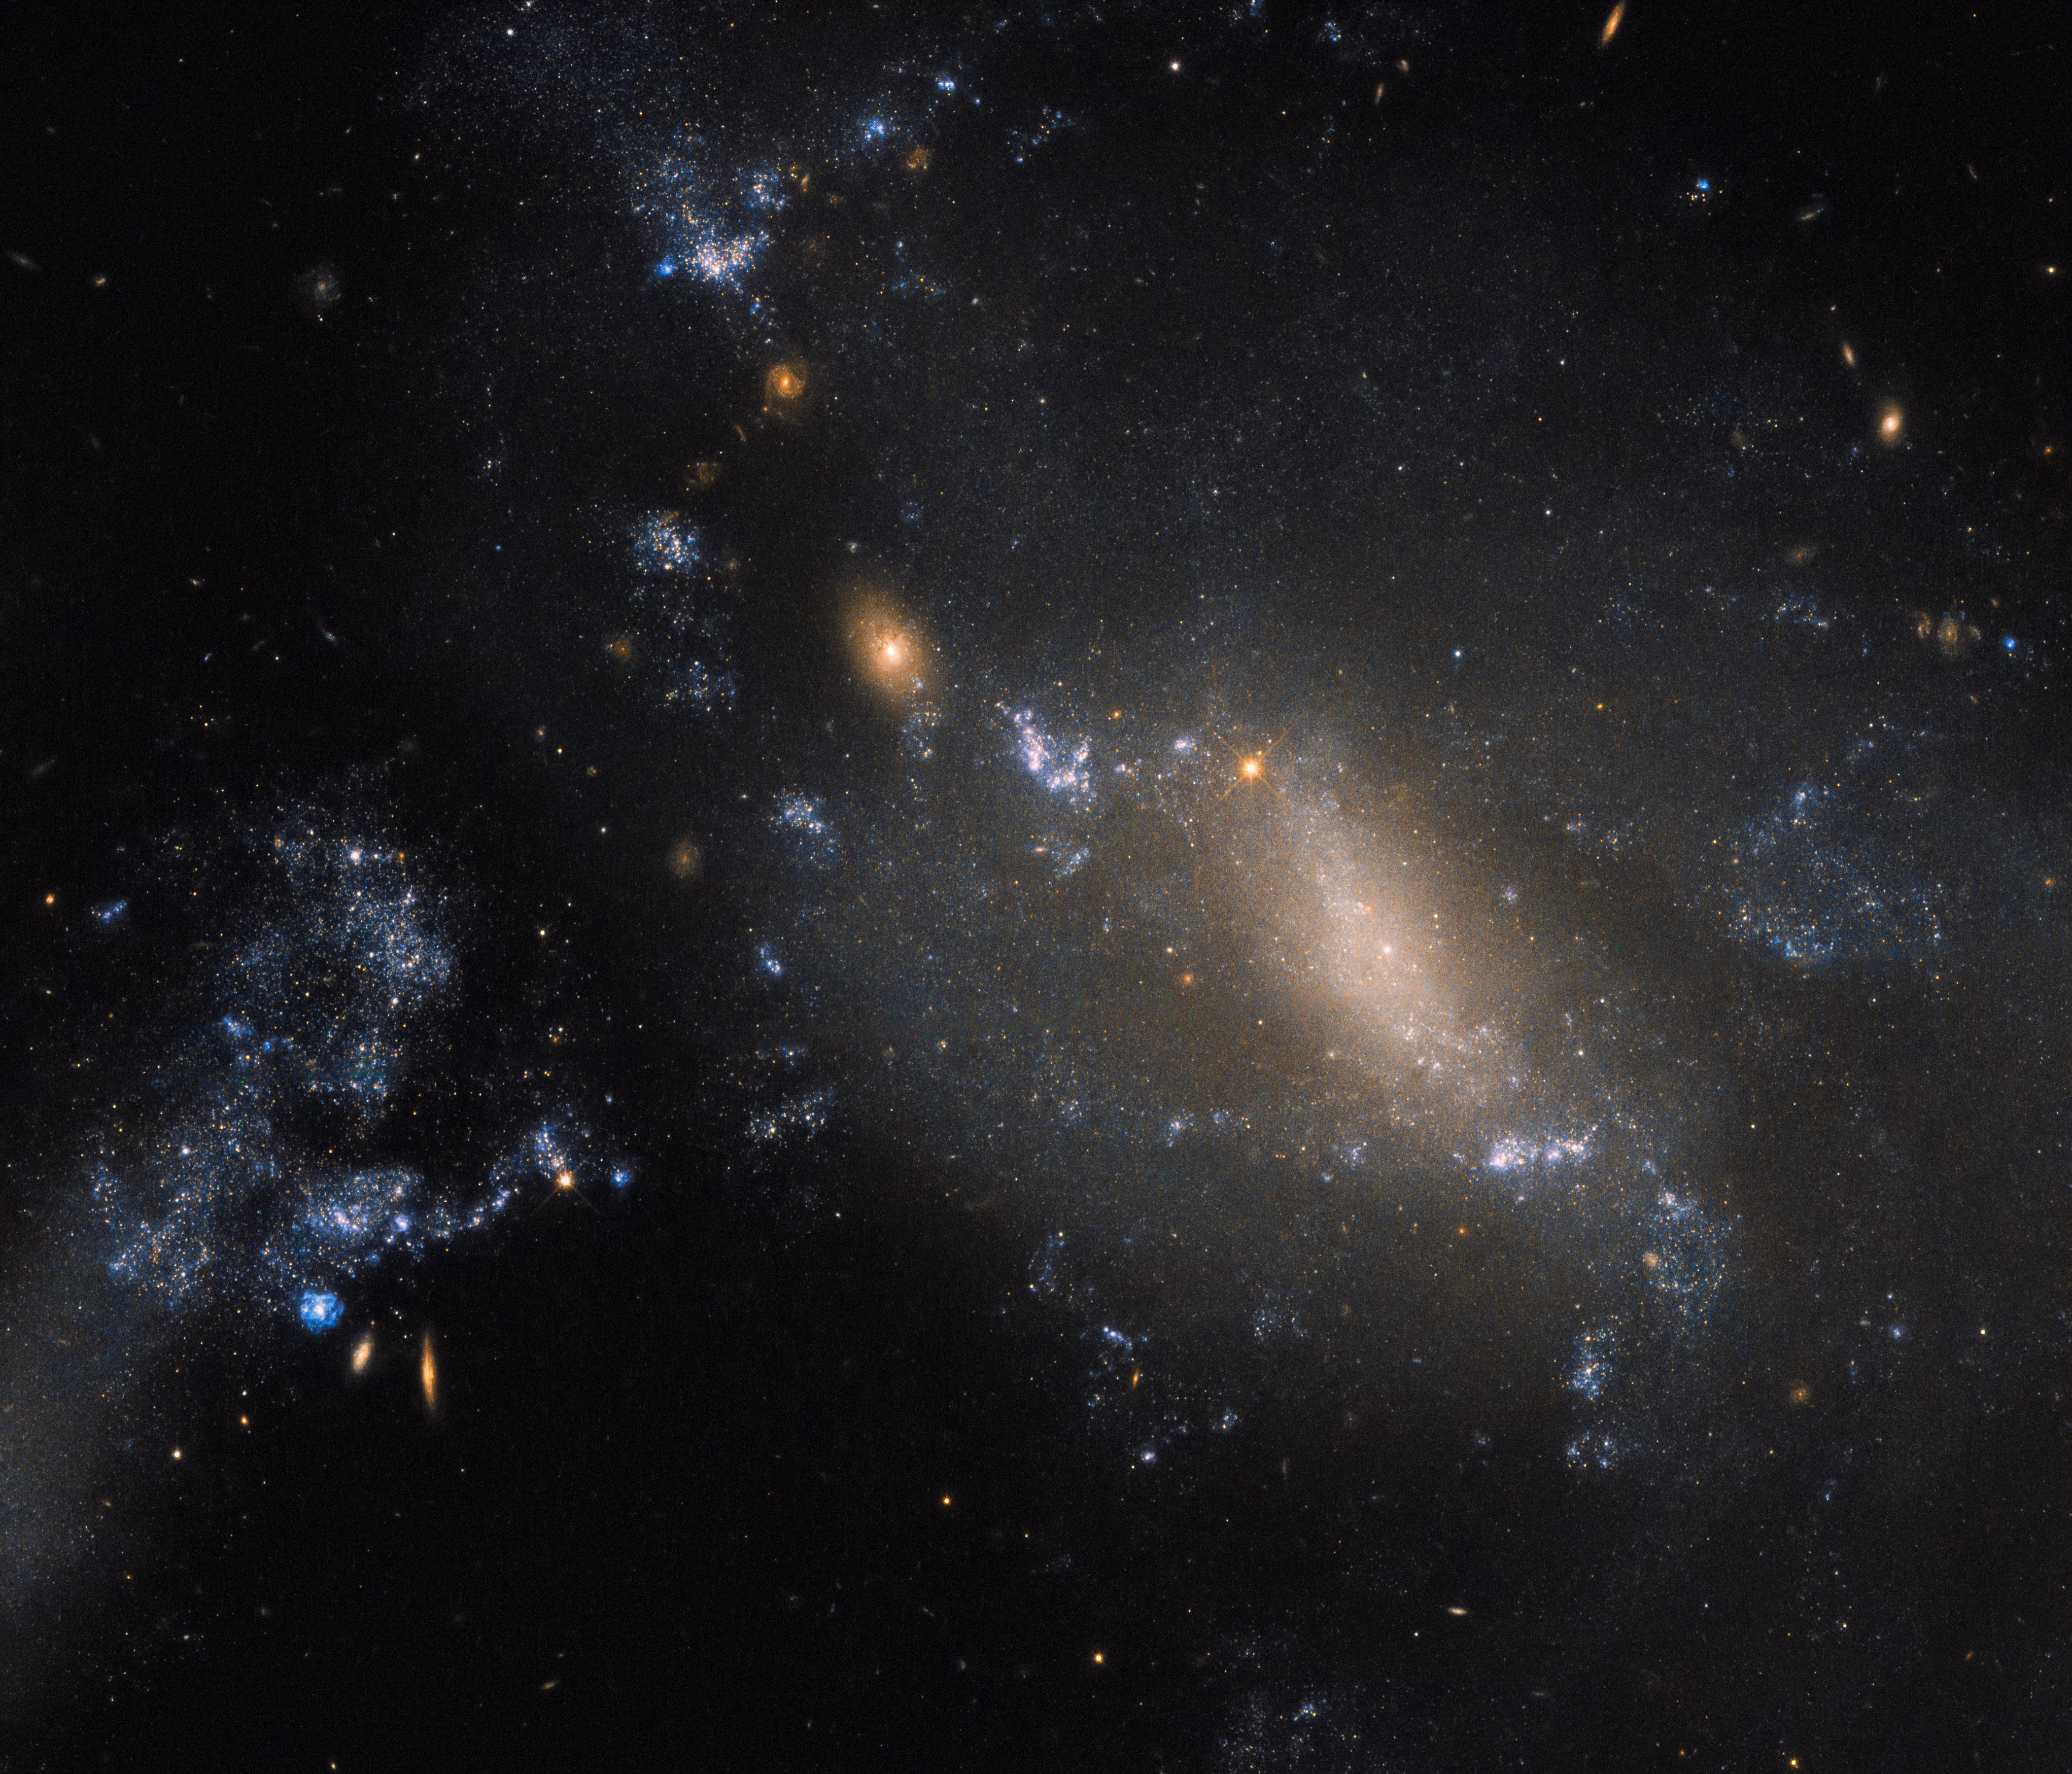

Defying cosmic convention

Some galaxies are harder to classify than others. Here, Hubble’s trusty Wide Field Camera 3 (WFC3) has captured a striking view of two interacting galaxies located some 60 million light-years away in the constellation of Leo (The Lion). The more diffuse and patchy blue glow covering the right side of the frame is known as NGC 3447 — sometimes NGC 3447B for clarity, as the name NGC 3447 can apply to the overall duo. The smaller clump to the upper left is known as NGC 3447A.

The trouble with space is that it is, to state the obvious, really, really big. Astronomers have for hundreds of years been discovering and naming galaxies, stars, cosmic clouds and more. Unifying and regulating the conventions and classifications for everything ever observed is very difficult, especially when you get an ambiguous object like NGC 3447, which stubbornly defies easy categorisation.

Overall, we know NGC 3447 comprises a couple of interacting galaxies, but we’re unsure what each looked like before they began to tear one another apart. The two sit so close that they are strongly influenced and distorted by the gravitational forces between them, causing the galaxies to twist themselves into the unusual and unique shapes seen here. NGC 3447A appears to display the remnants of a central bar structure and some disrupted spiral arms, both properties characteristic of certain spiral galaxies. Some identify NGC 3447B as a former spiral galaxy, while others categorise it as being an irregular galaxy.

Credit: ESA/Hubble & NASA